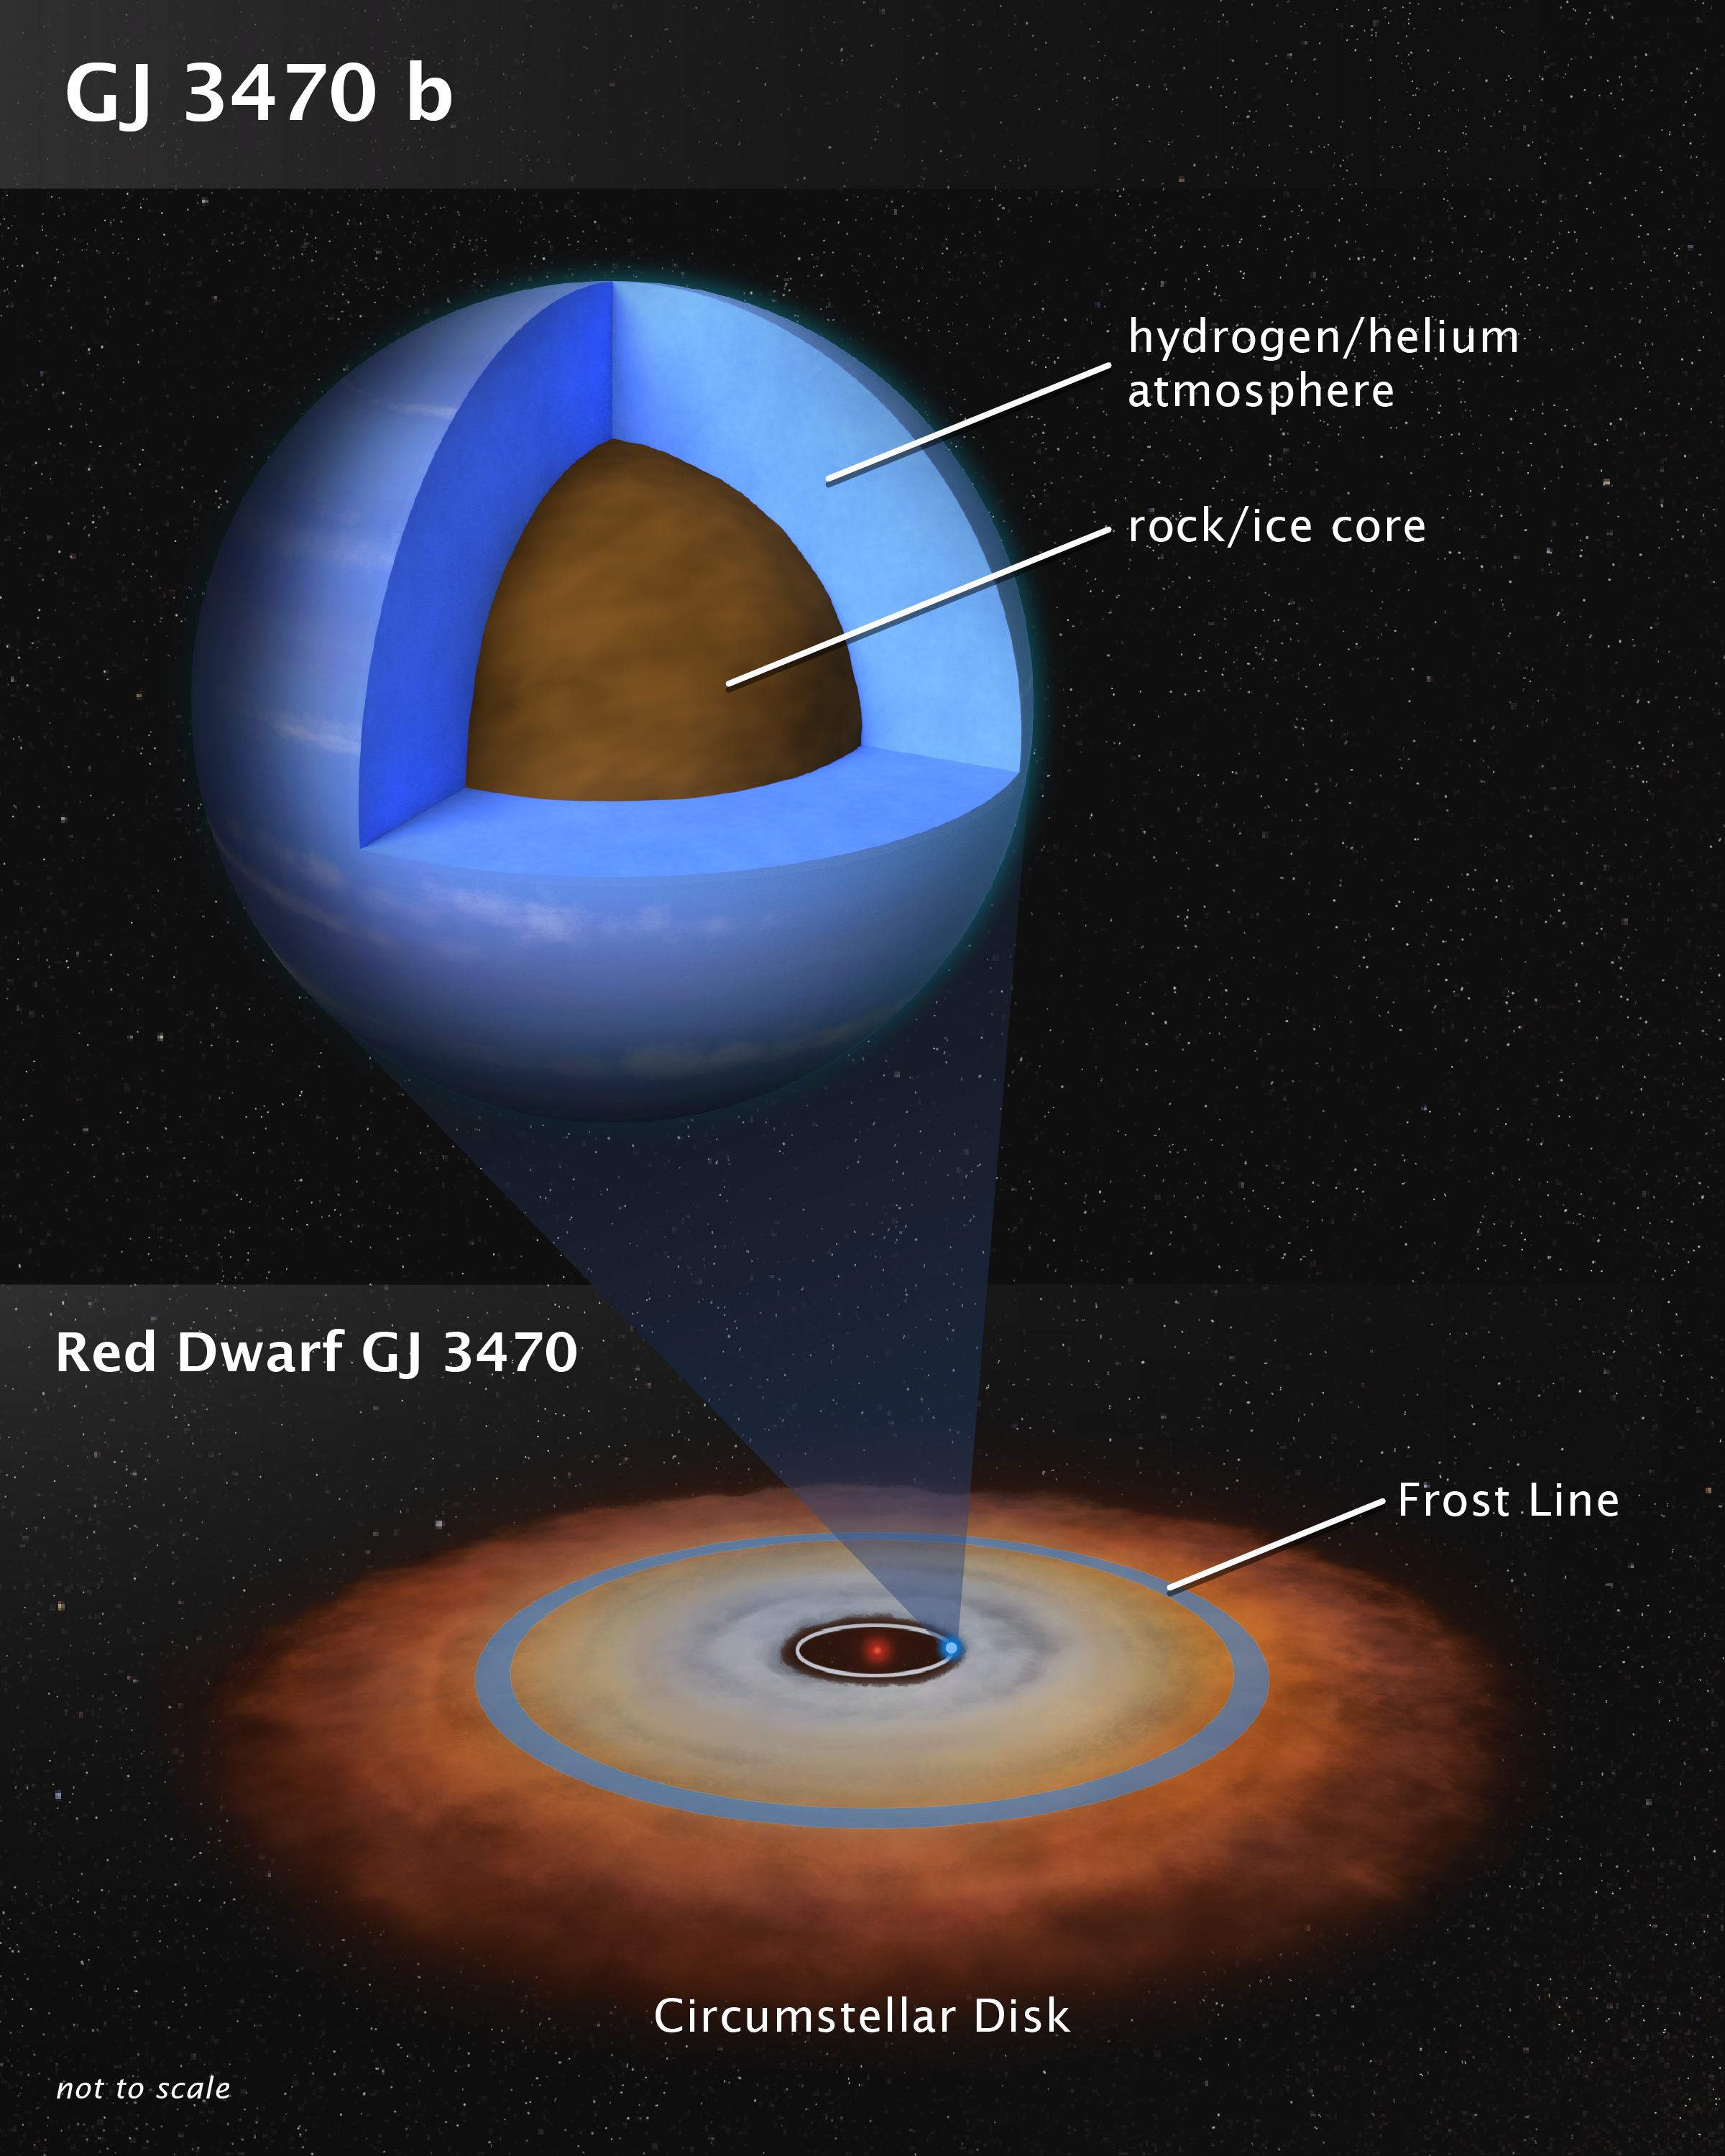

Structure of Exoplanet GJ 3470 b

This artist's illustration shows the theoretical internal structure of the exoplanet GJ 3470 b. It is unlike any planet found in the Solar System. Weighing in at 12.6 Earth masses the planet is more massive than Earth but less massive than Neptune. Unlike Neptune, which is 3 billion miles from the Sun, GJ 3470 b may have formed very close to its red dwarf star as a dry, rocky object. It then gravitationally pulled in hydrogen and helium gas from a circumstellar disk to build up a thick atmosphere. The disk dissipated many billions of years ago, and the planet stopped growing. The bottom illustration shows the disk as the system may have looked long ago. Observations by the NASA/ESA Hubble Space telescope and the NASA Spitzer space telescopes have chemically analyzed the composition of GJ 3470 b's very clear and deep atmosphere, yielding clues to the planet's origin. Many planets of this mass exist in our galaxy.

Credit: NASA, ESA, and L. Hustak (STScI)